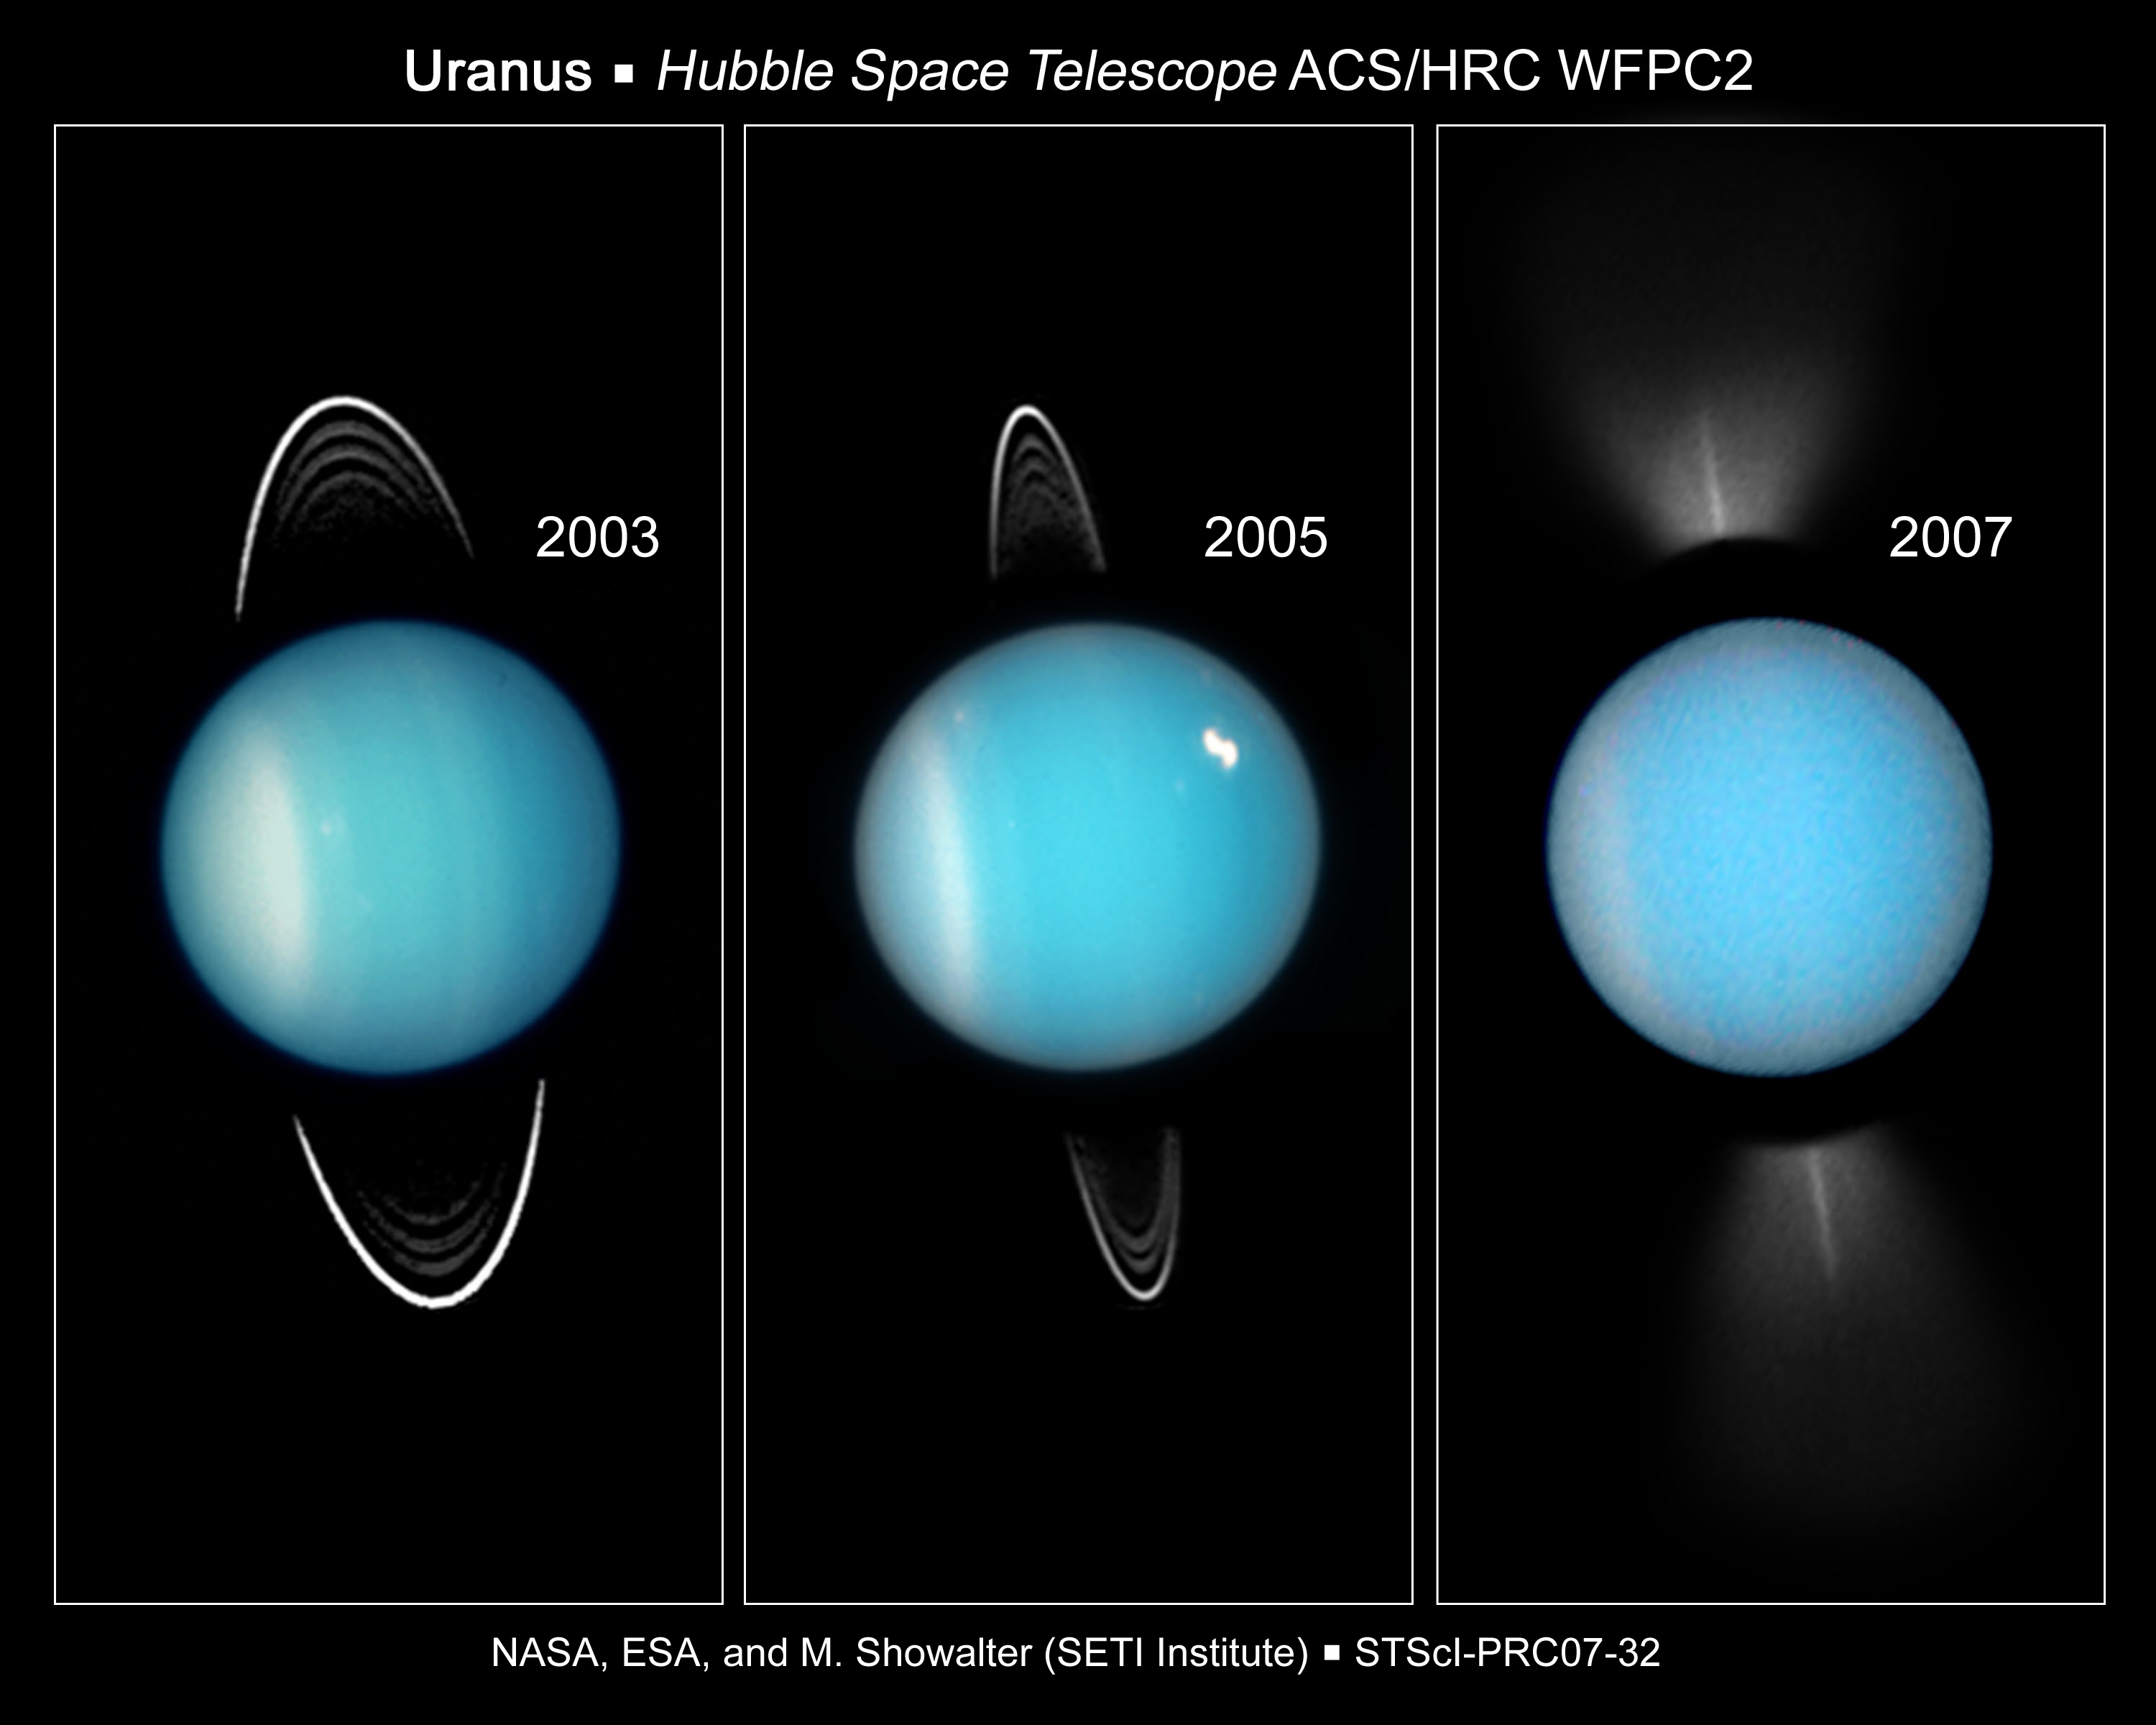

Going, Going, Gone: Hubble Captures Uranus' Rings on Edge

This series of images from NASA's Hubble Space Telescope shows how the ring system around the distant planet Uranus appears at ever more oblique (shallower) tilts as viewed from Earth - culminating in the rings being seen edge-on in three observing opportunities in 2007. The best of these events appears in the far right image taken with Hubble's Wide Field Planetary Camera 2 on August 14, 2007.

Credit: NASA, ESA, and M. Showalter (SETI Institute)